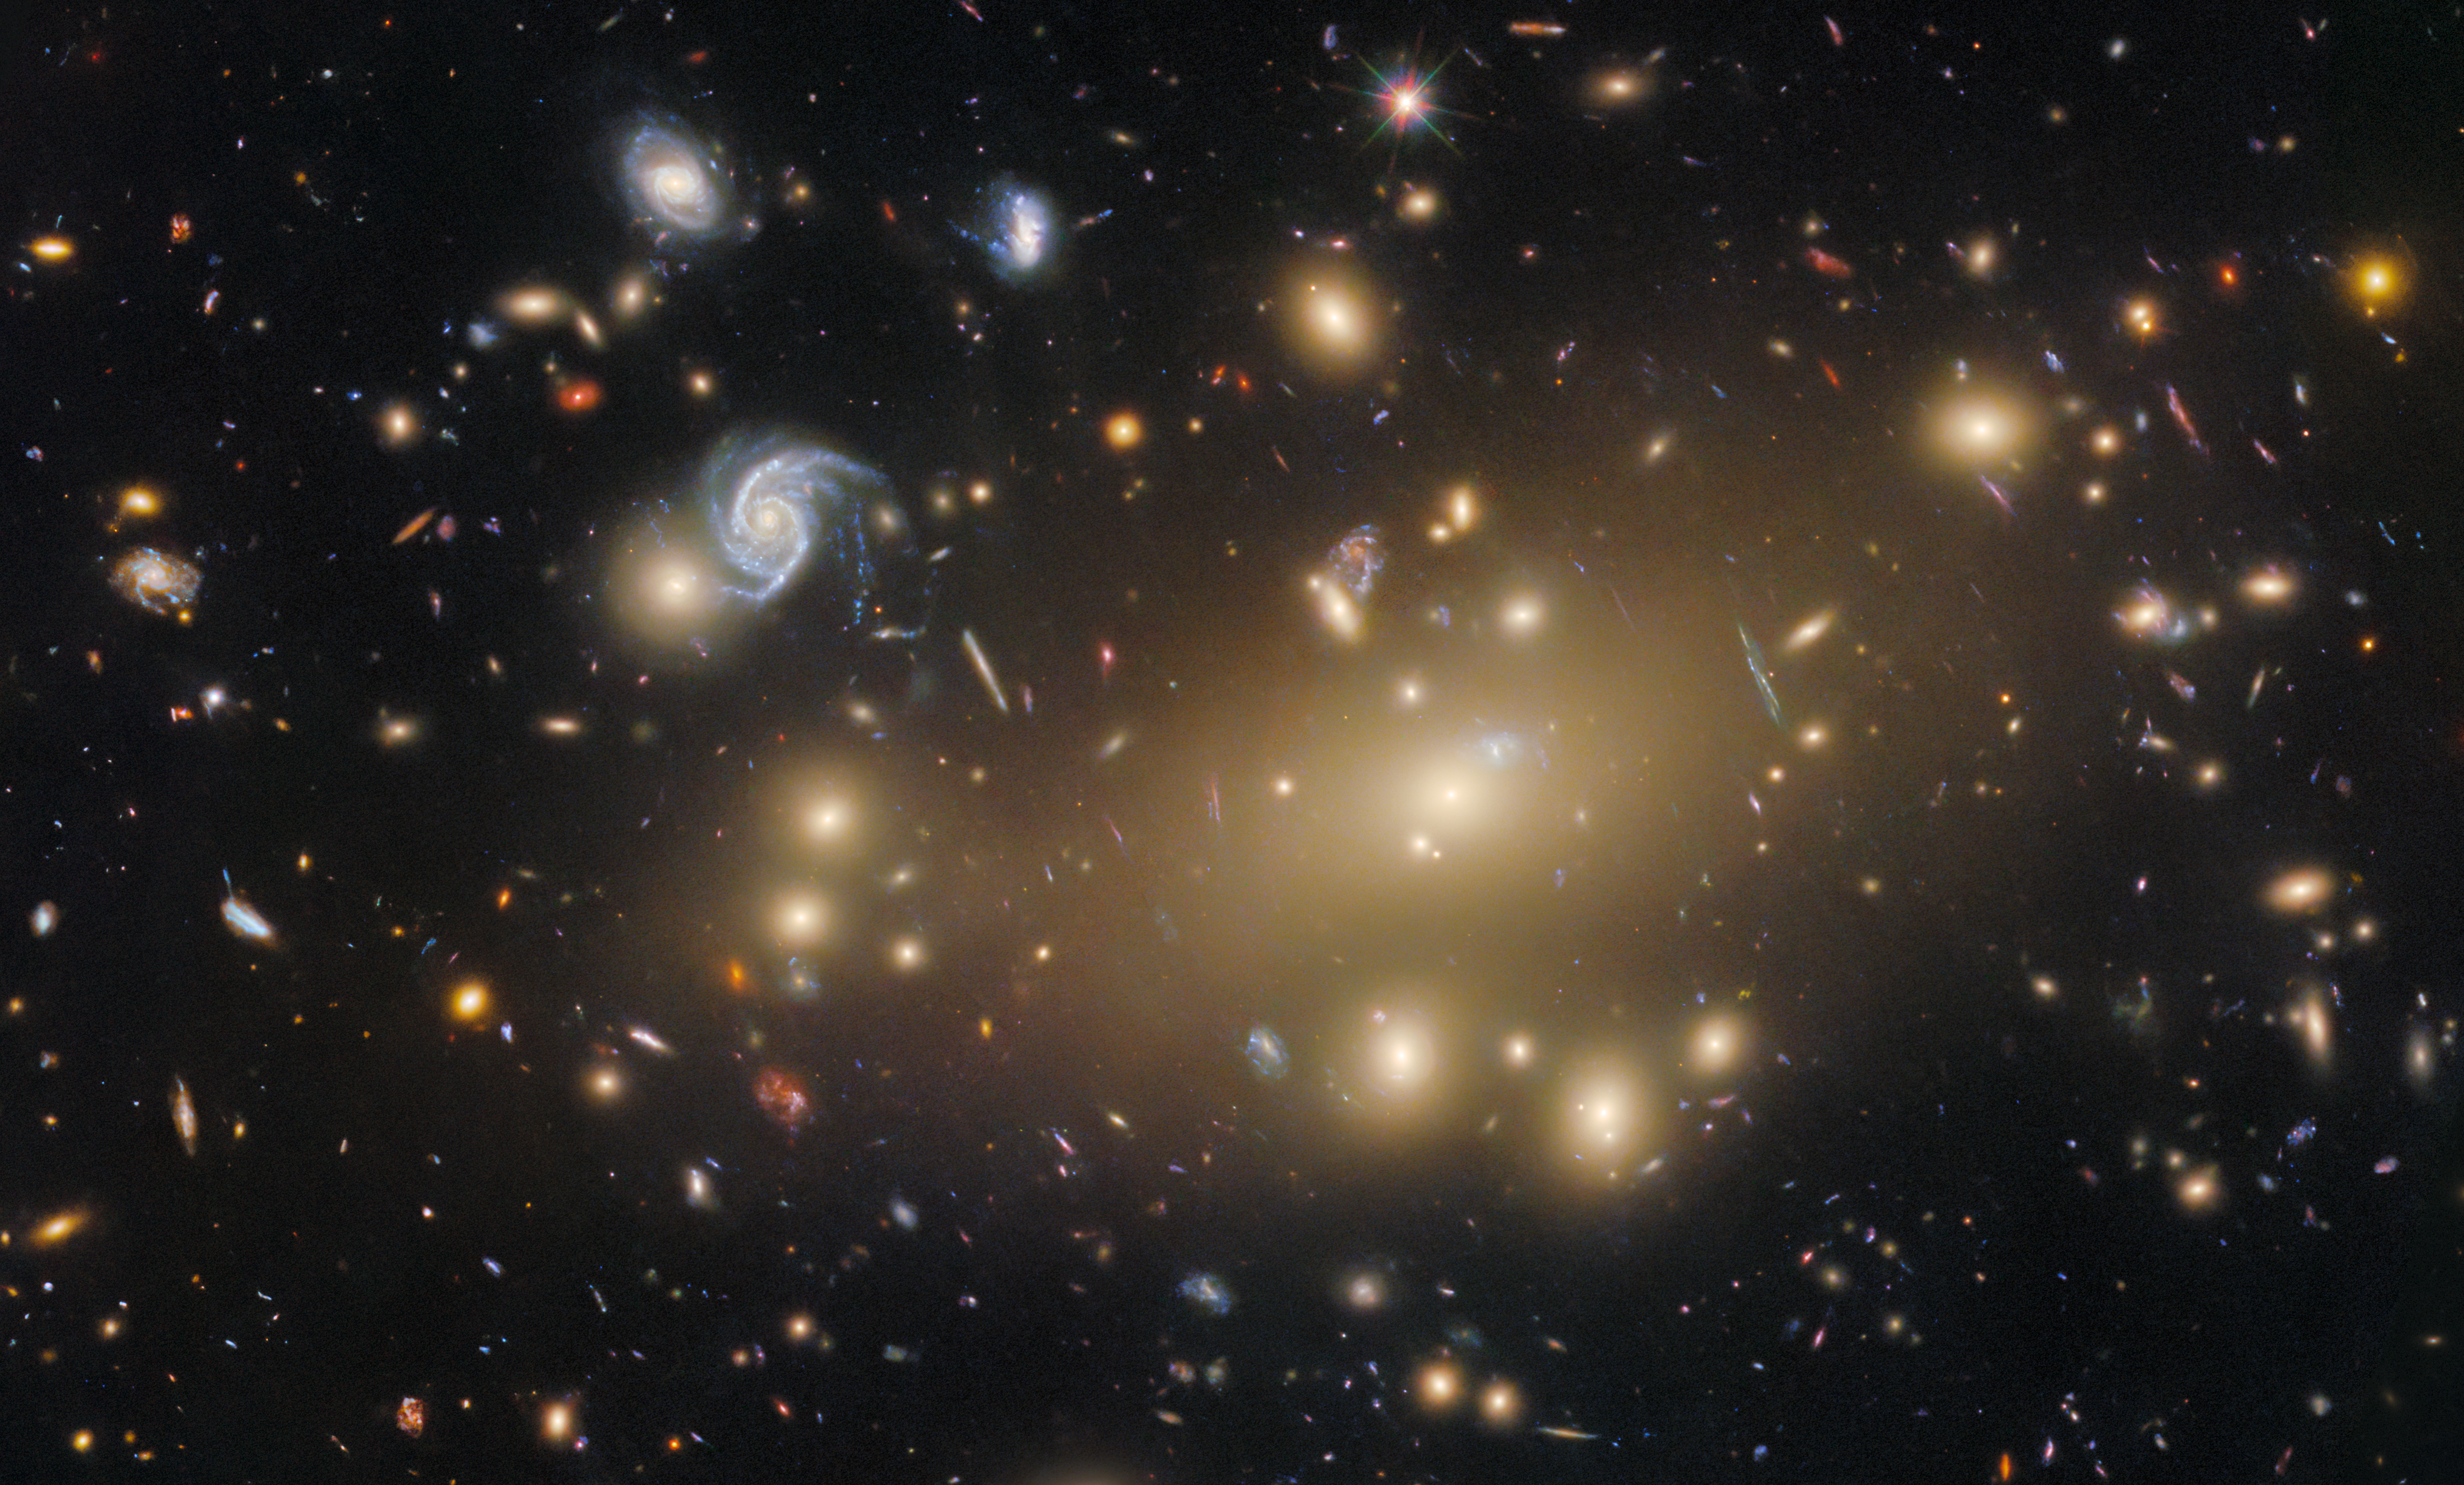

Portrait of a galaxy cluster

A massive, spacetime-warping cluster of galaxies is the setting of today’s NASA/ESA Hubble Space Telescope Picture of the Week. The galaxy cluster in question is Abell 209, which is located 2.8 billion light-years away in the constellation Cetus (The Whale).

This Hubble image of Abell 209 shows more than a hundred galaxies, but there’s more to this cluster than even Hubble’s discerning eye can see. Abell 209’s galaxies are separated by millions of light-years, and the seemingly empty space between the galaxies is actually filled with hot, diffuse gas that can be spotted only at X-ray wavelengths. An even more elusive occupant of this galaxy cluster is dark matter: a form of matter that does not interact with light. The Universe is understood to be comprised of 5% normal matter, 25% dark matter, and 70% dark energy.

Hubble observations like the ones used to create this image can help astronomers answer fundamental questions about our Universe, including mysteries surrounding dark matter and dark energy. These investigations leverage the immense mass of a galaxy cluster, which can bend the fabric of spacetime itself and create warped and magnified images of background galaxies and stars in a process called gravitational lensing.

While this image lacks the dramatic rings that gravitational lensing can sometimes create, Abell 209 still shows subtle signs of lensing at work, in the form of streaky, slightly curved galaxies within the cluster’s golden glow. By measuring the distortion of these galaxies, astronomers can map the distribution of mass within the cluster, illuminating the underlying cloud of dark matter. This information, which Hubble’s fine resolution and sensitive instruments help to provide, is critical for testing theories of how our Universe has evolved.

Credit: ESA/Hubble & NASA, M. Postman, P. Kelly